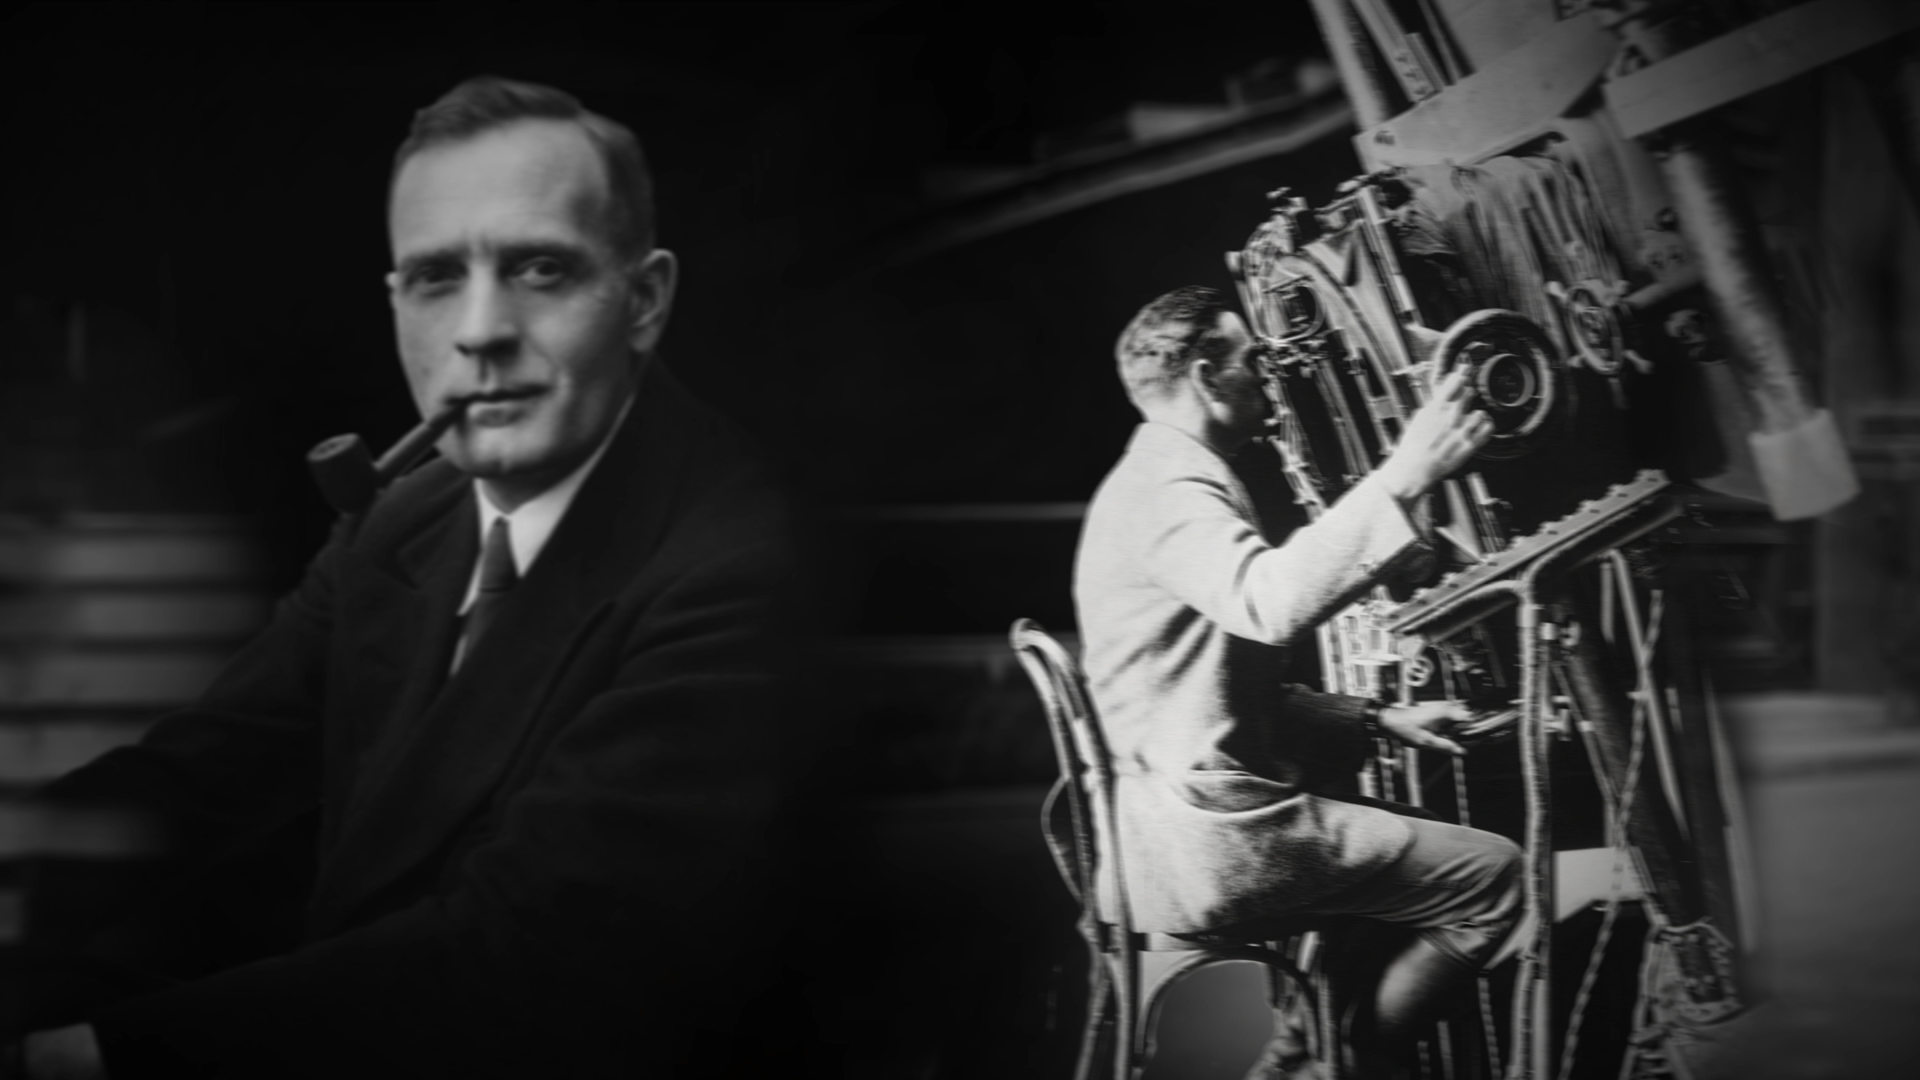

Still from Hubblecast episode 89: Edwin Hubble

This is a still from Hubblecast 89 which talks about the life of Edwin Hubble.

Credit: NASA & ESA